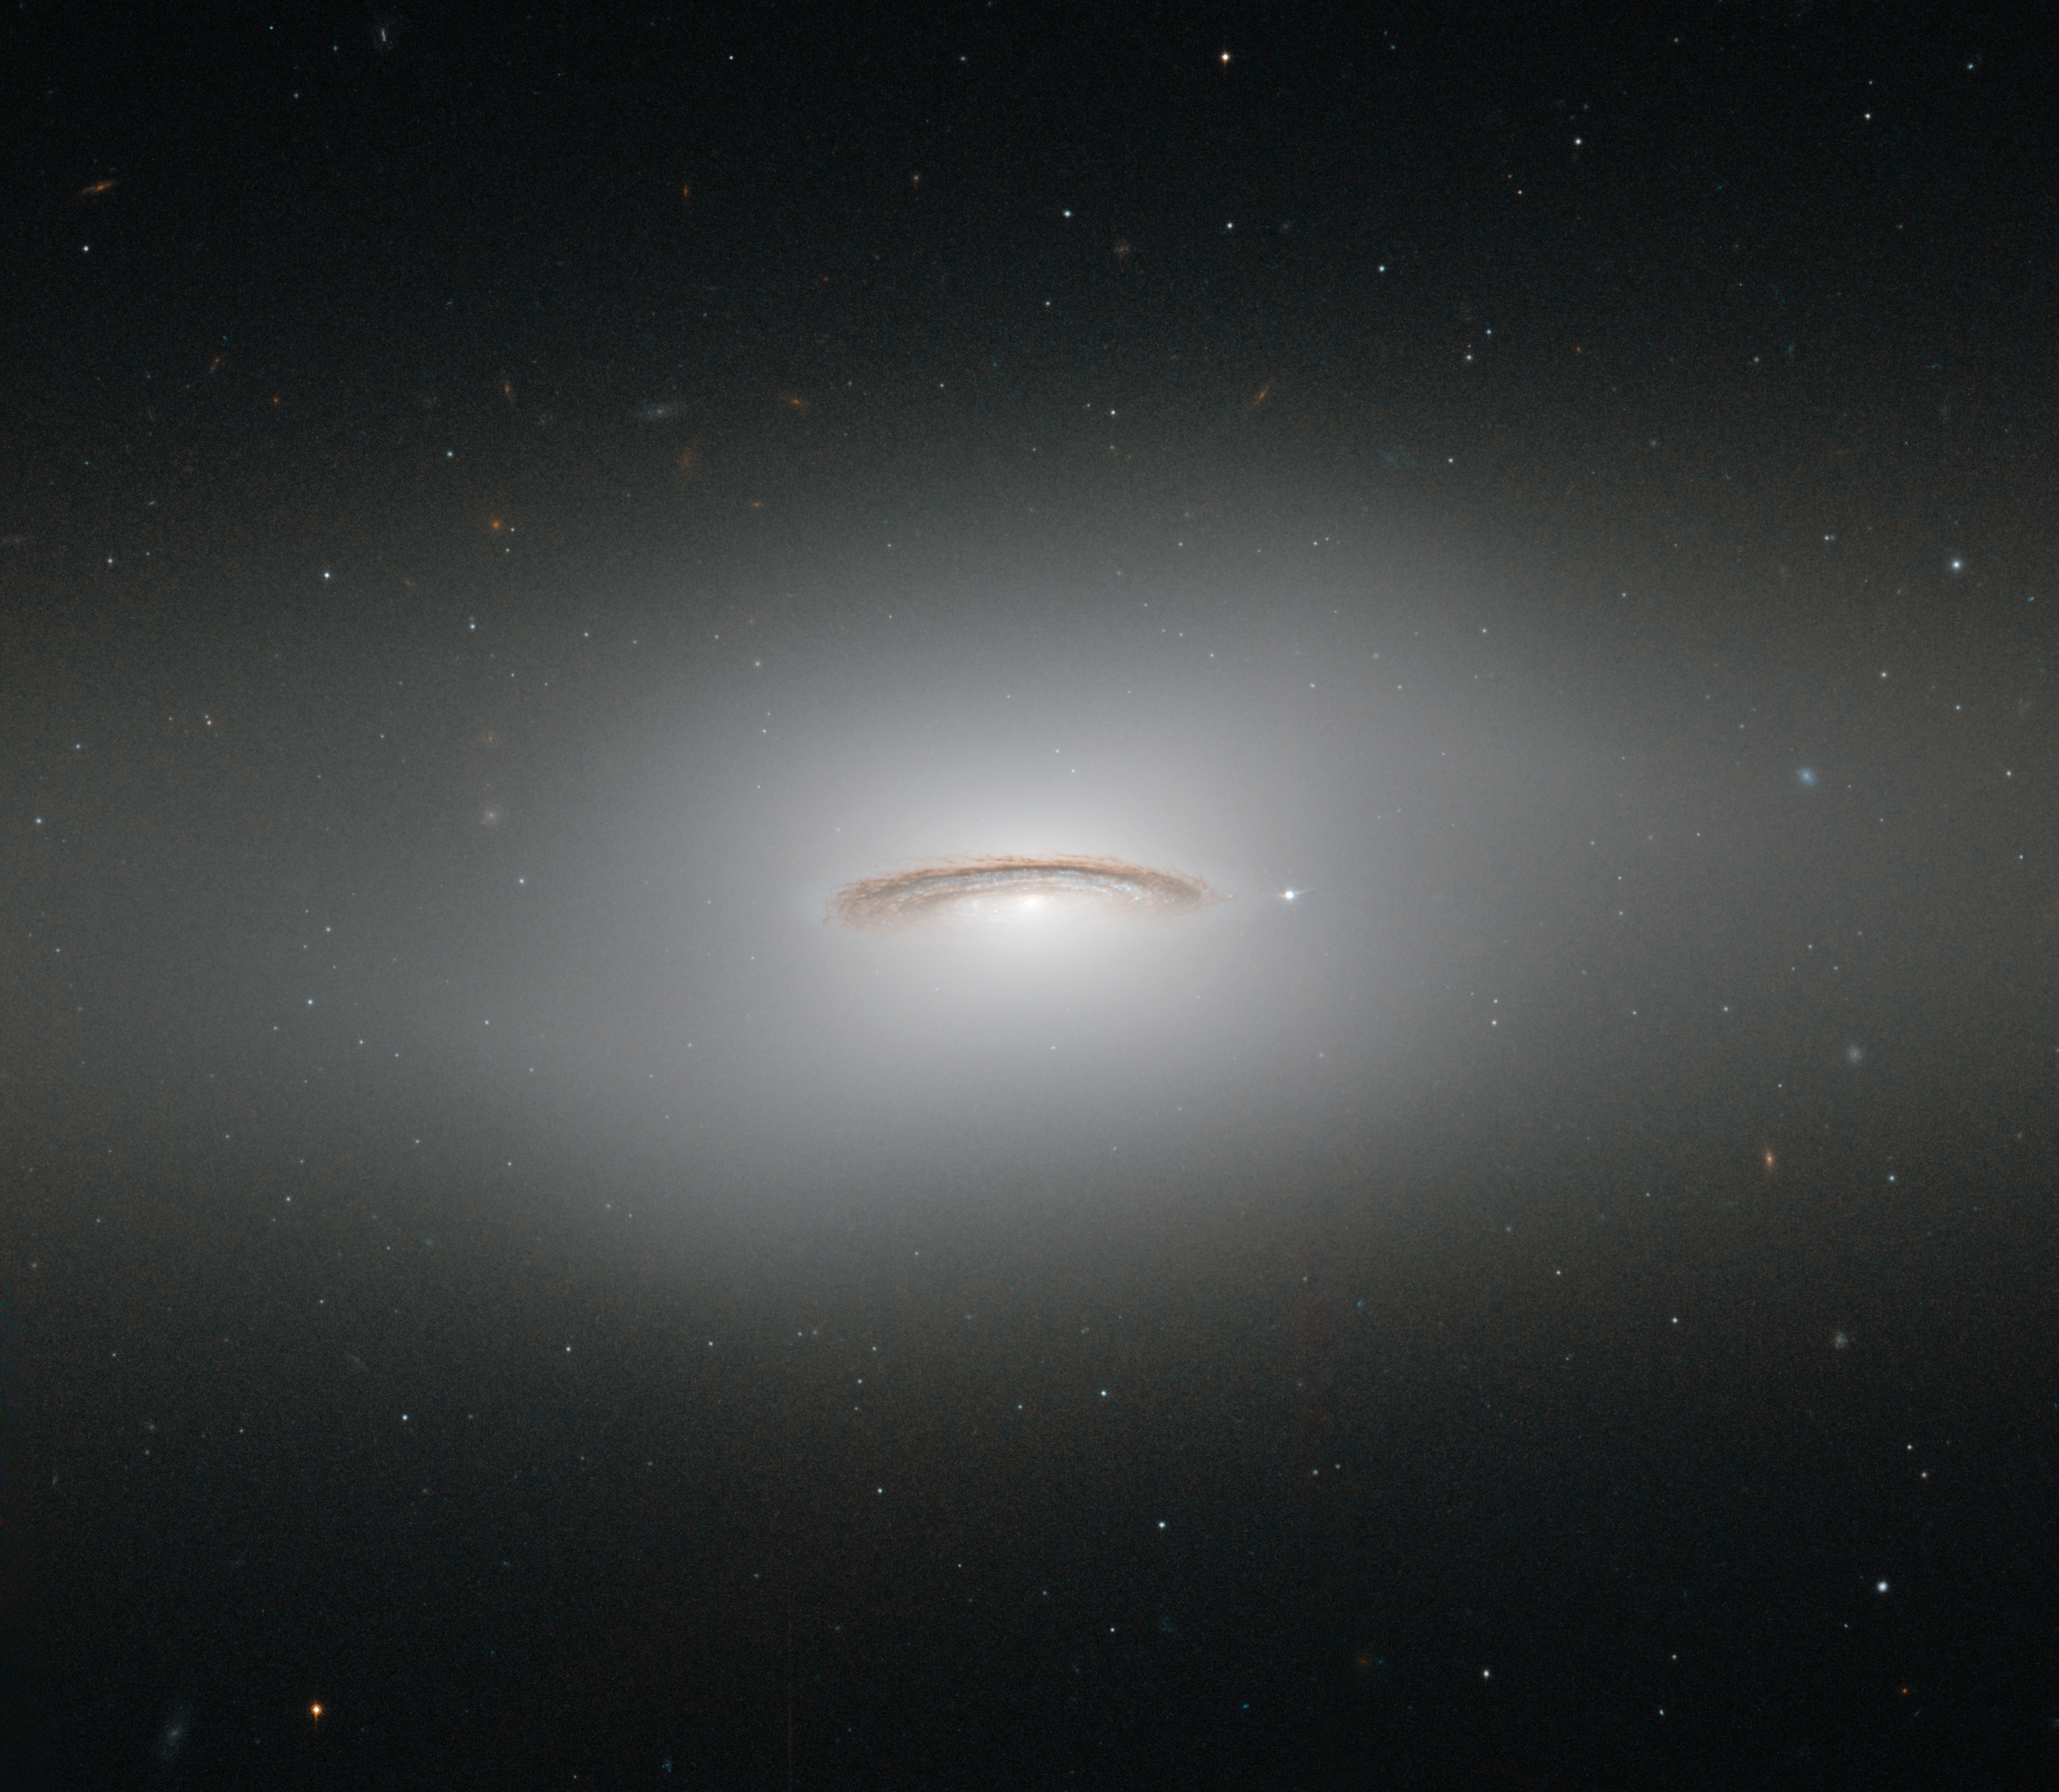

The whirling disc of NGC 4526

This neat little galaxy is known as NGC 4526. Its dark lanes of dust and bright diffuse glow make the galaxy appear to hang like a halo in the emptiness of space in this new image from the NASA/ESA Hubble Space Telescope.

Although this image paints a picture of serenity, the galaxy is anything but. It is one of the brightest lenticular galaxies known, a category that lies somewhere between spirals and ellipticals. It has hosted two known supernova explosions, one in 1969 and another in 1994, and is known to have a colossal supermassive black hole at its centre that has the mass of 450 million Suns.

NGC 4526 is part of the Virgo cluster of galaxies. Ground-based observations of galaxies in this cluster have revealed that a quarter of these galaxies seem to have rapidly rotating discs of gas at their centres. The most spectacular of these is this galaxy, NGC 4526, whose spinning disc of gas, dust, and stars reaches out uniquely far from its heart, spanning some 7% of the galaxy's entire radius.

This disc is moving incredibly fast, spinning at more than 250 kilometres per second. The dynamics of this quickly whirling region were actually used to infer the mass of NGC 4526’s central black hole — a technique that had not been used before to constrain a galaxy’s central black hole.

This image was taken using Hubble’s Wide Field Planetary Camera 2.

A version of this image was entered into the Hubble’s Hidden Treasures image processing competition by contestant Judy Schmidt. Hidden Treasures was an initiative to invite astronomy enthusiasts to search the Hubble archive for stunning images that have never been seen by the general public.

Credit: ESA/Hubble & NASA
Acknowledgement: Judy Schmidt